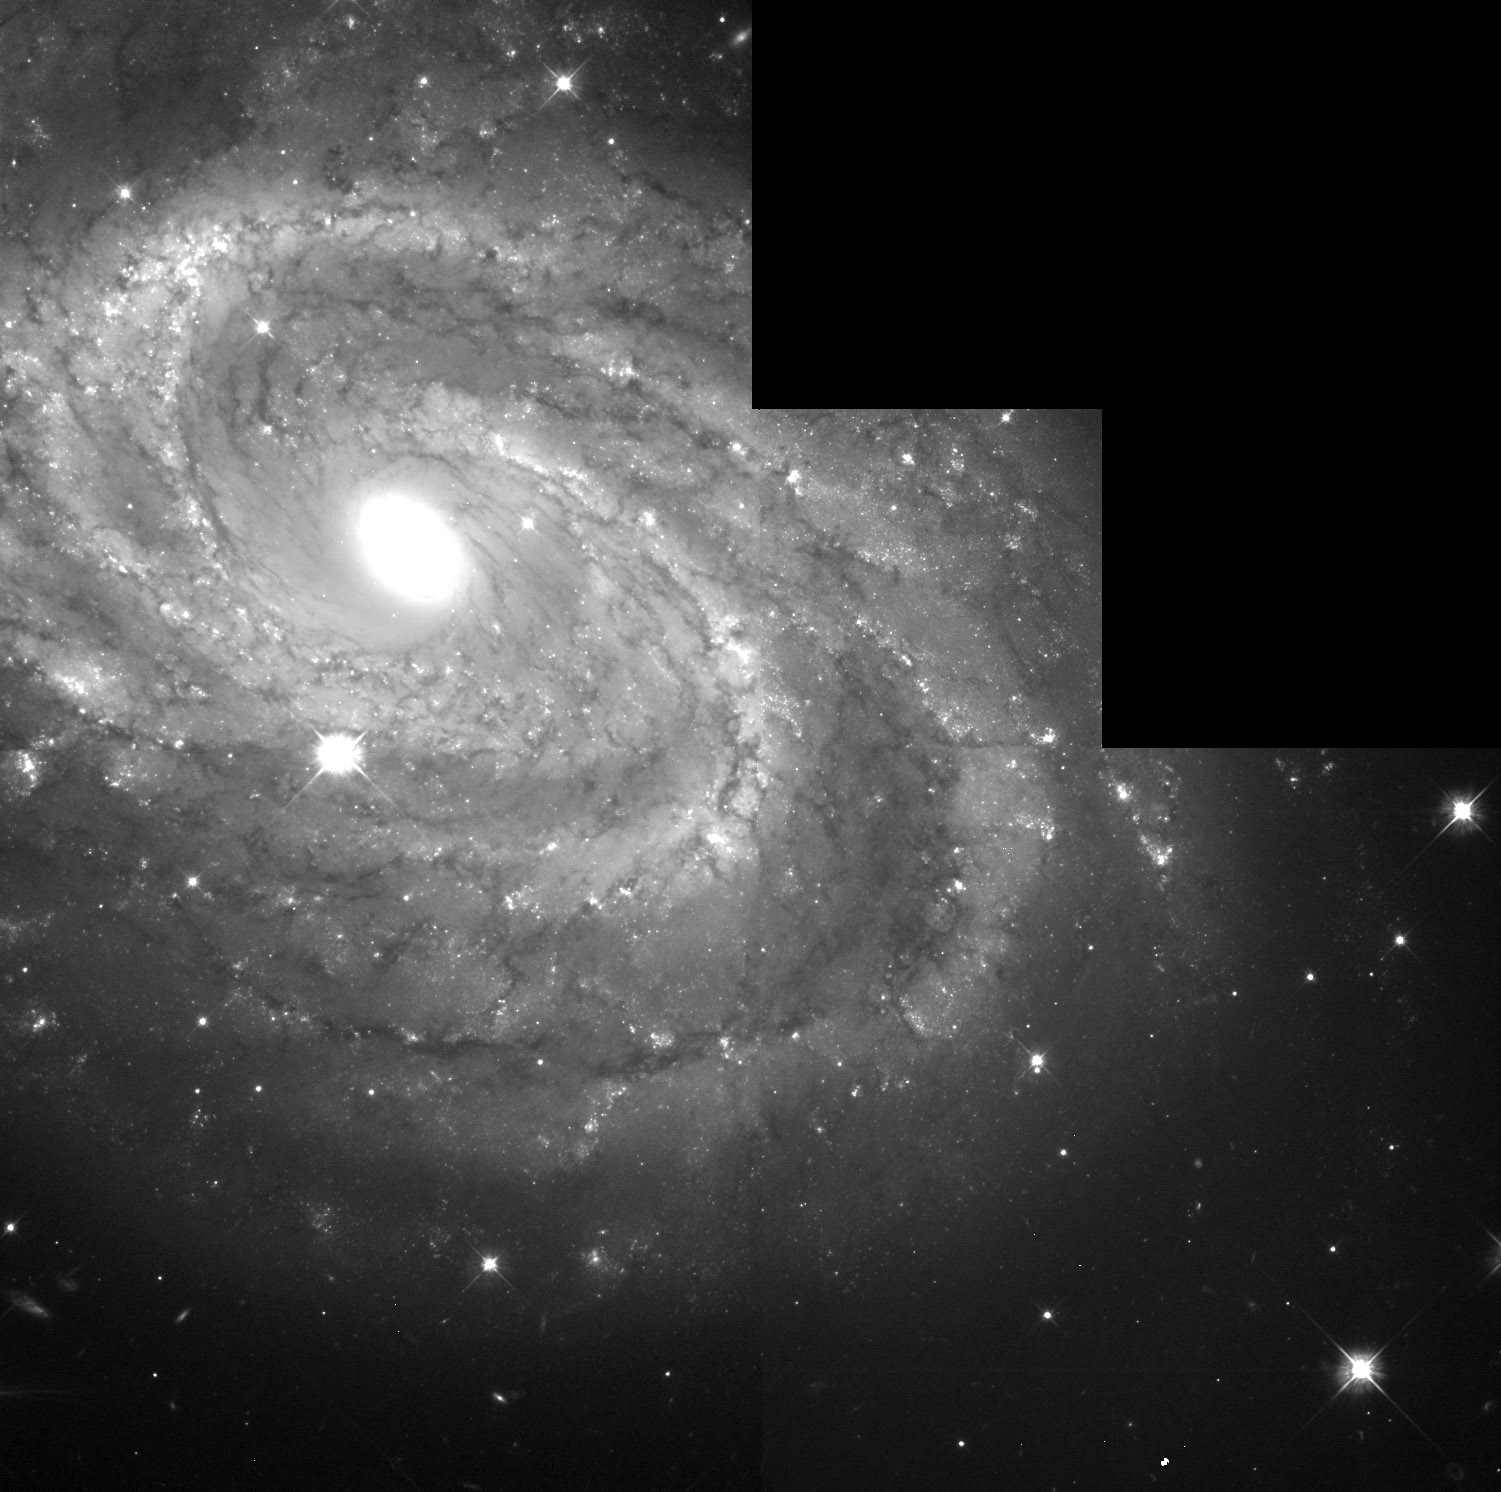

Full WFPC2 Field NGC 4603

NGC 4603 is a spiral galaxy which can be found in the constellation Centaurus, more than 100 million light years away. In 1999 the NASA/ESA Hubble Space Telescope was studying this galaxy in search for Cepheid variable stars to measure their periodicity. Using the periodicity of the identified 40 Cepheids an accurate distance of the galaxy could be calculated.

In 2008 the galaxy became again in the focus of the astronomical society as a high luminosity supernova exploded in it.

Credit: NASA & ESA